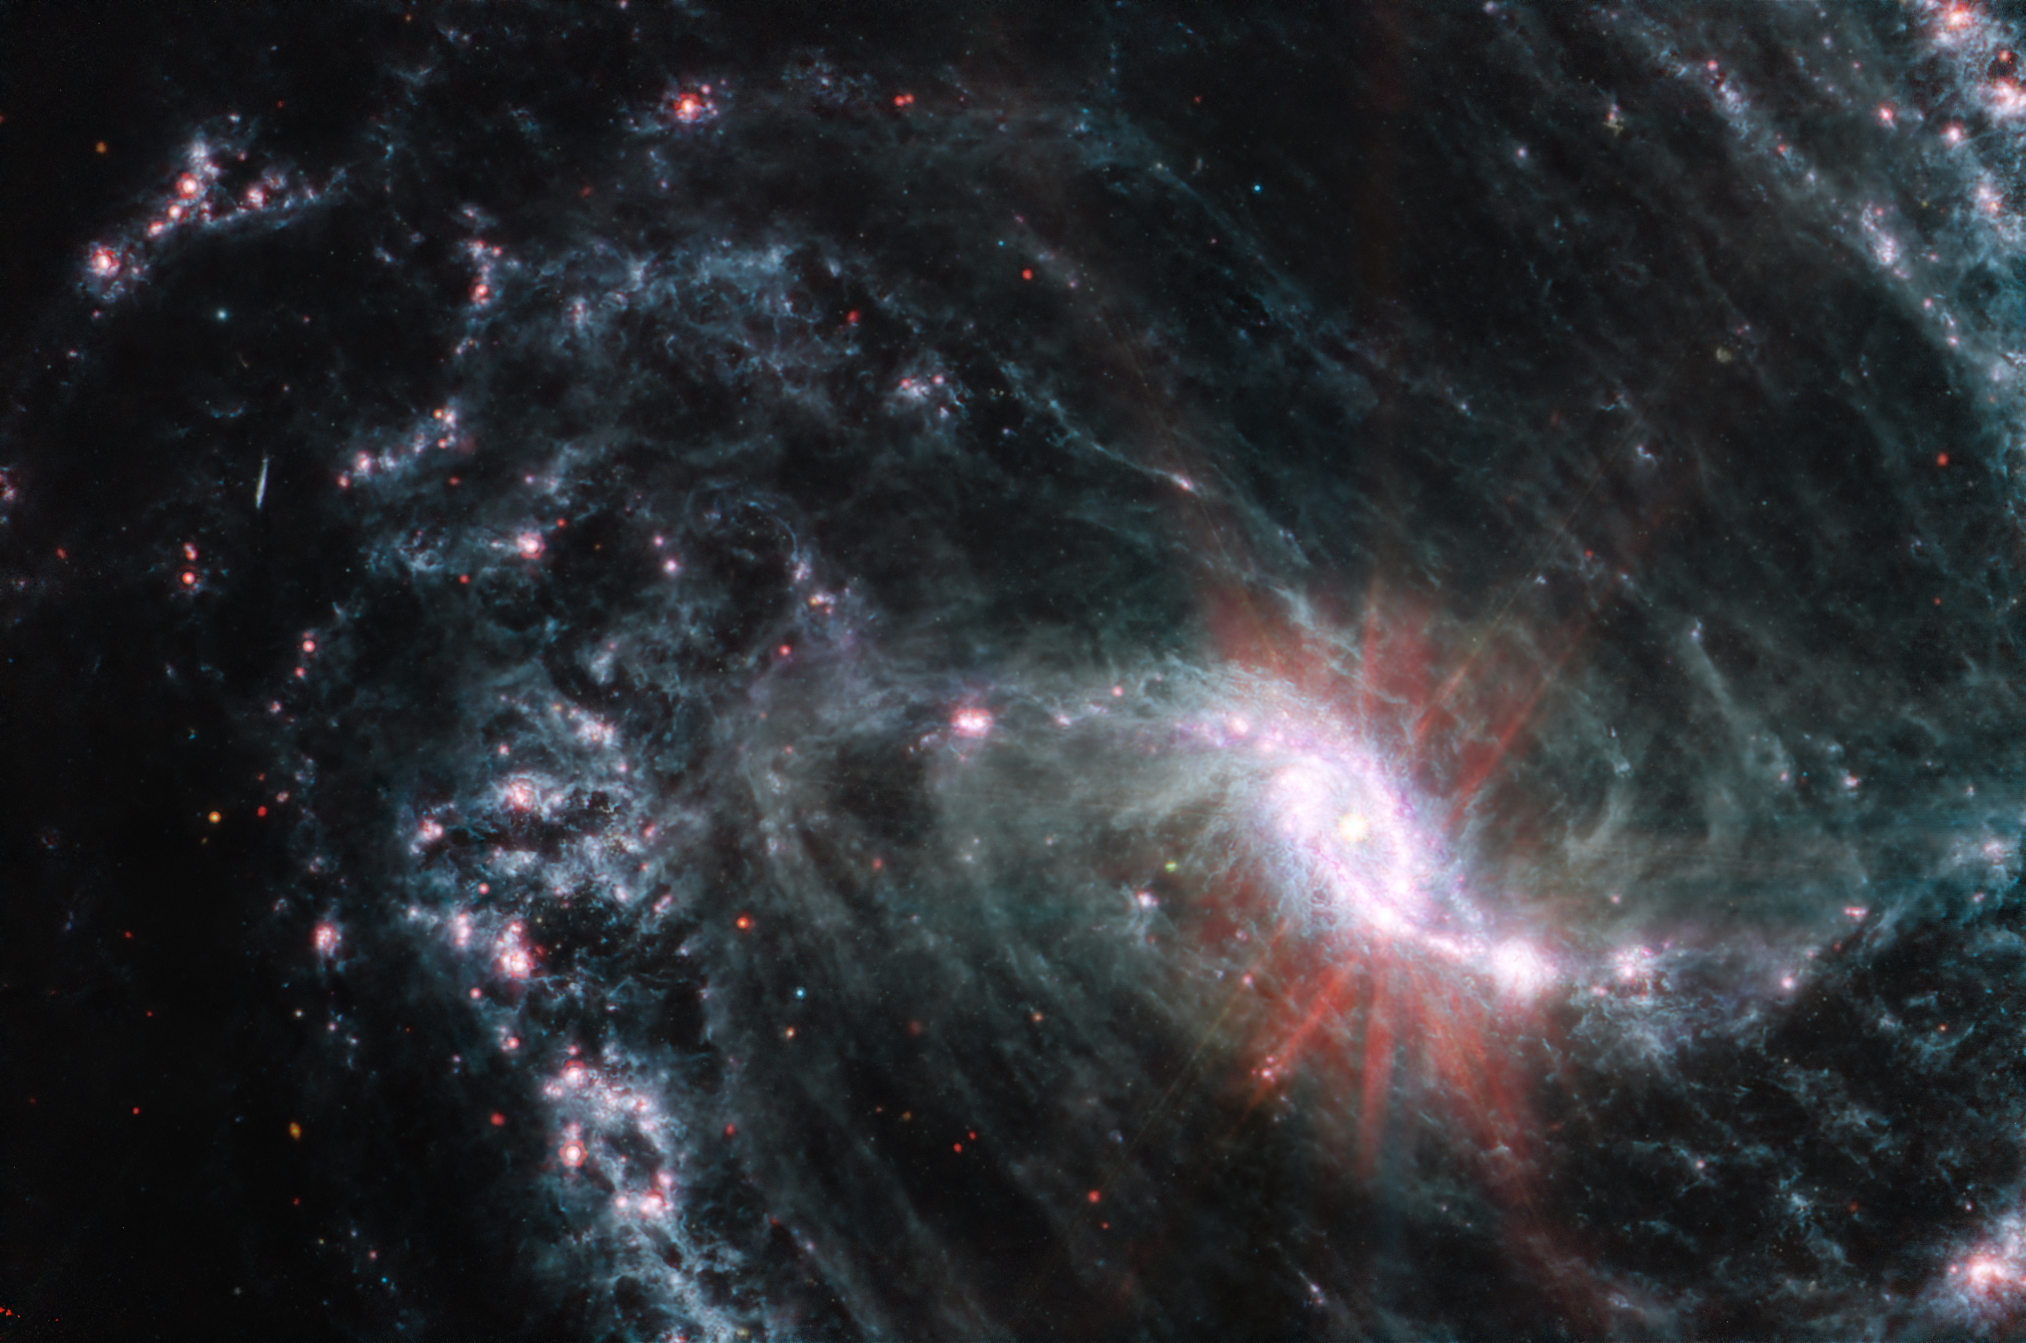

NGC 1365 (MIRI Image)

Scientists are getting their first look with the NASA/ESA/CSA James Webb Space Telescope’s powerful resolution at how the formation of young stars influences the evolution of nearby galaxies. NGC 1365, observed here by Webb’s Mid-Infrared Instrument (MIRI) is one of a total of 19 galaxies targeted for study by the Physics at High Angular resolution in Nearby Galaxies (PHANGS) collaboration.

As revealed by the MIRI observations of NGC 1365, clumps of dust and gas in the interstellar medium have absorbed the light from forming stars and emitted it back out in the infrared, lighting up an intricate network of cavernous bubbles and filamentary shells influenced by young stars releasing energy into the galaxy’s spiral arms.

Webb’s exquisite resolution also picks up several extremely bright star clusters not far from the core and newly observed recently formed clusters along the outer edges of the spiral arms.

Additionally, the Webb images provide insights into how the orbits of stars and gas vary depending on where they form, and how this results in the population of older clusters outside the inner star-formation ring.

NGC 1365 is a double-barred spiral galaxy that lies about 56 million light-years away from Earth. It’s one of the largest galaxies currently known to astronomers, spanning twice the length of the Milky Way.
In this image of NGC 1356, blue, green, and red were assigned to Webb’s MIRI data at 7.7, 10 and 11.3, and 21 microns (the F770W, F1000W and F1130W, and F2100W filters, respectively).

MIRI was contributed by ESA and NASA, with the instrument designed and built by a consortium of nationally funded European Institutes (The MIRI European Consortium) and NASA’s Jet Propulsion Laboratory, in partnership with the University of Arizona.

Credit: NASA, ESA, CSA, and J. Lee (NOIRLab), A. Pagan (STScI)